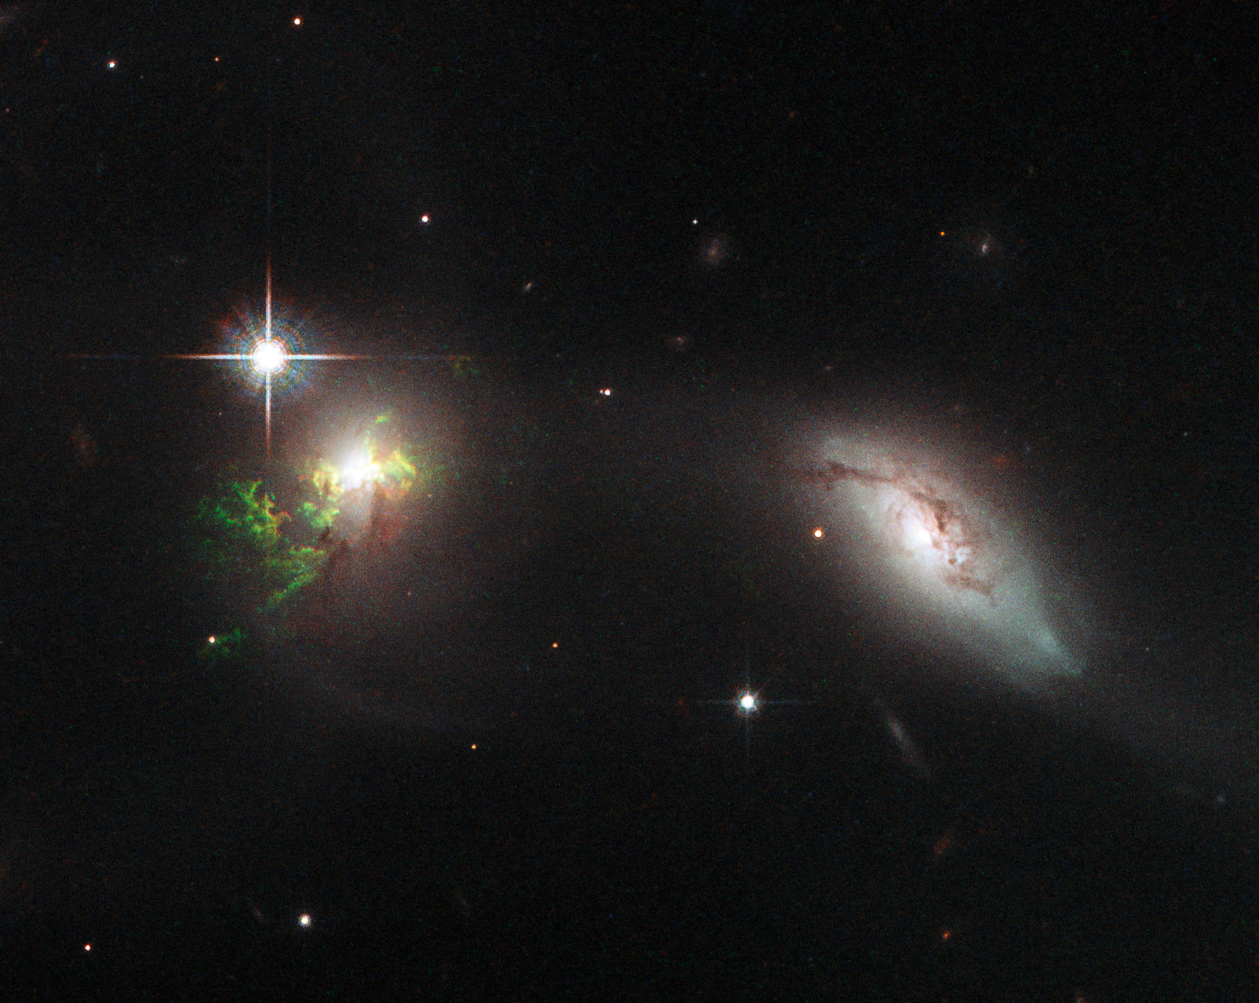

Hubble view of green filament in galaxy UGC 11185

This new NASA/ESA Hubble Space Telescope image shows ghostly green filaments, lying within galaxy UGC 11185. This filament was illuminated by a blast of radiation from a quasar — a very luminous and compact region that surrounds the supermassive black hole at the centre of its host galaxy.

Its bright green hue is a result of ionised oxygen, which glows brightly at green wavelengths.

Credit: NASA, ESA, W. Keel (University of Alabama, USA)